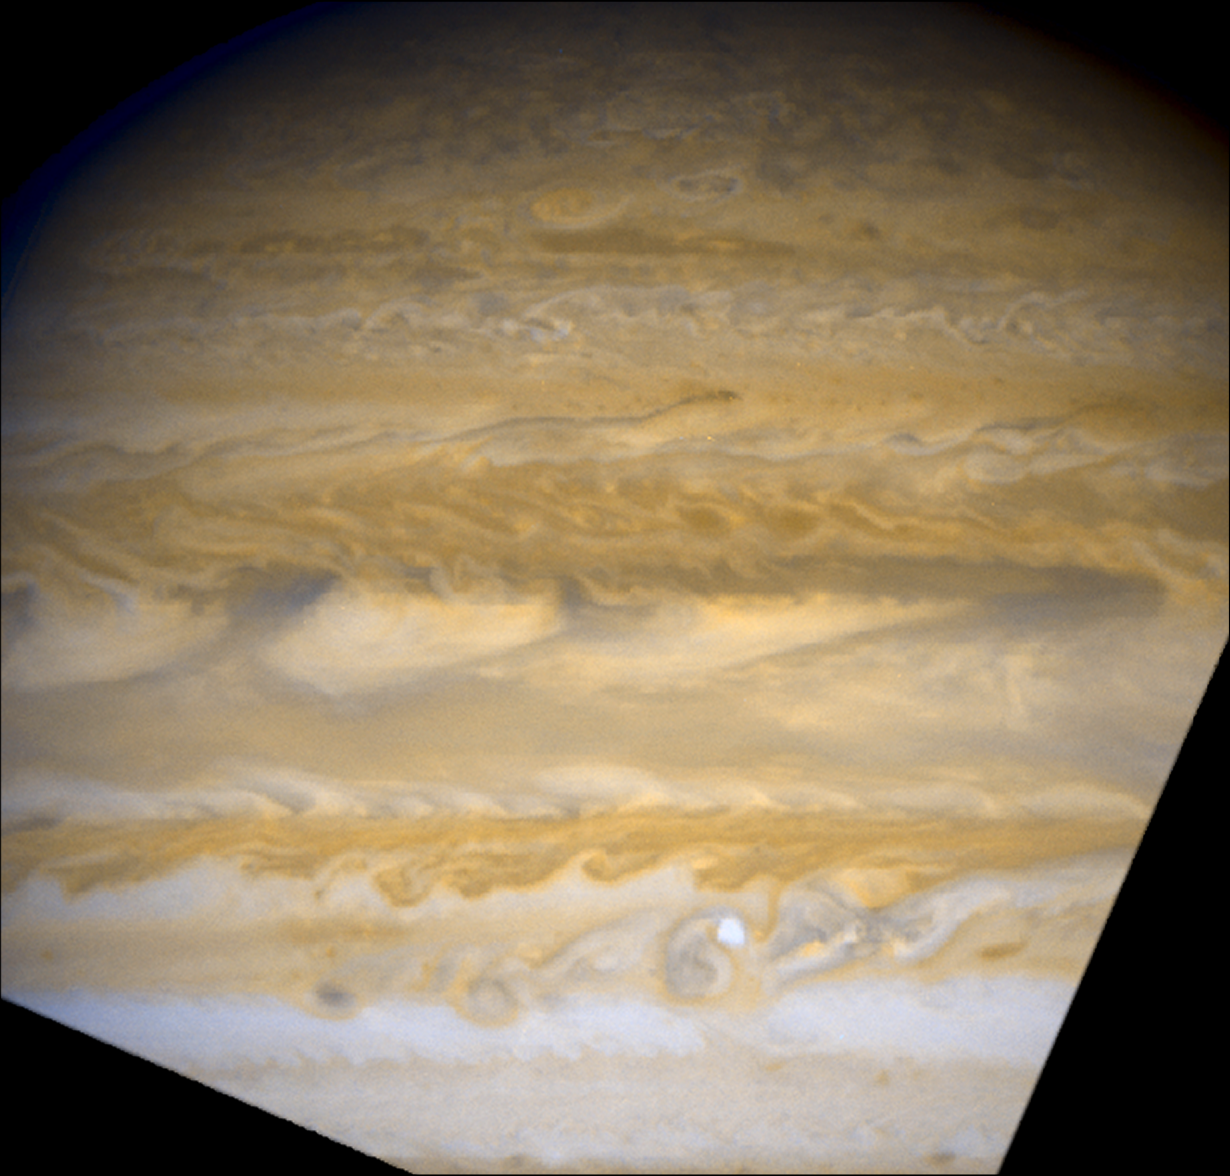

Jupiter - June 5, 2007

Massive Jupiter is undergoing dramatic atmospheric changes that have never been seen before with the keen "eye" of NASA's Hubble Space Telescope.

Credit: NASA, ESA, and A. Sanchez-Lavega (University of the Basque Country)